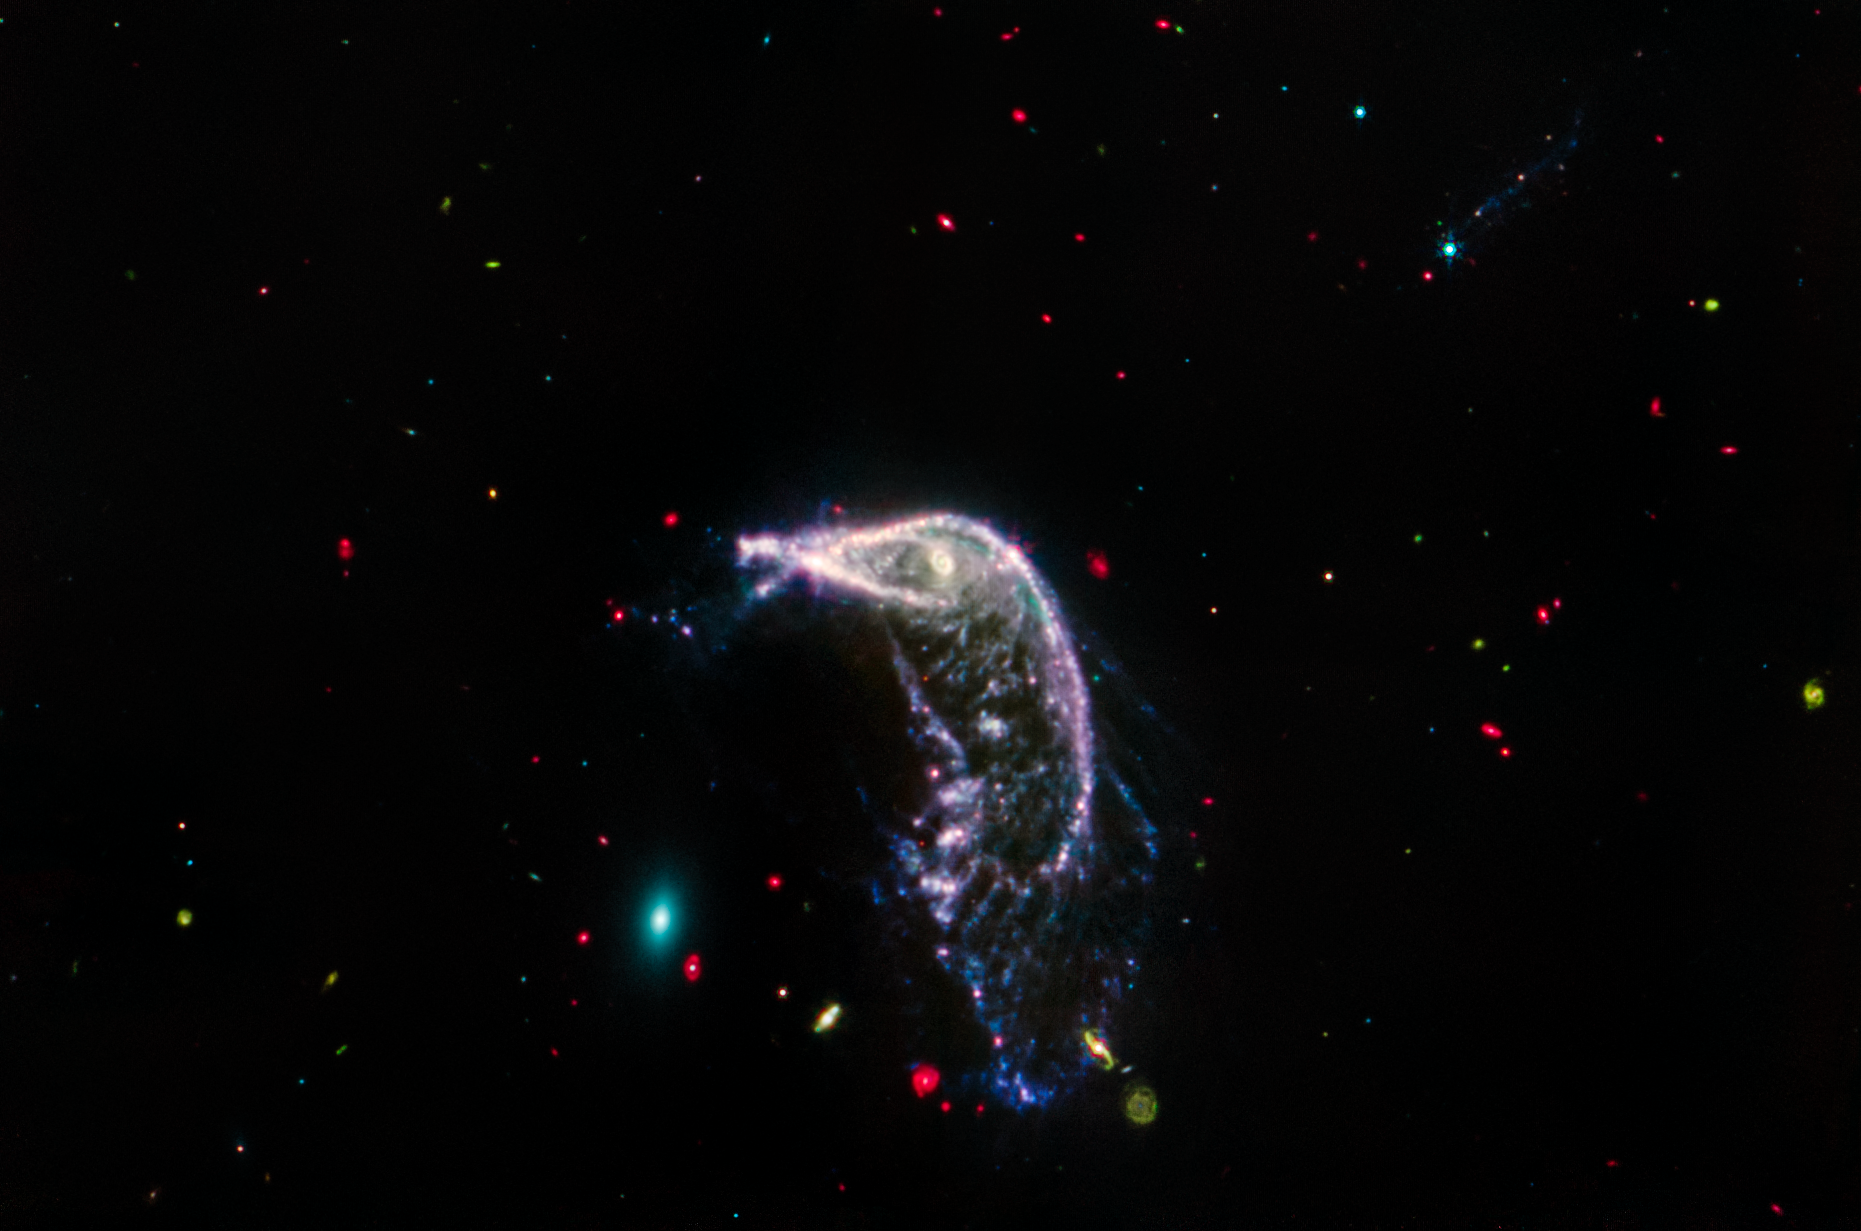

Interacting galaxies Arp 142 (MIRI image)

Webb’s mid-infrared view of interacting galaxies Arp 142 seems to sing in primary colours. The background of space is like a yawning darkness speckled with bright, multi-coloured beads.

This image was taken by MIRI, the telescope’s Mid-InfraRed Instrument, which astronomers use to study cooler and older objects, dust, and extremely distant galaxies.

Here, the Egg appears as an exceptionally small teal oval with gauzy layers. Mid-infrared light predominantly shows the oldest stars in the elliptical galaxy, which has lost or used up most of its gas and dust. This is why the view is so different from the combined image, which includes near-infrared light.

At right, the Penguin’s shape is relatively unchanged. The MIRI image shows all the gas and dust that has been distorted and stretched, as well as the smoke-like material, in blue, that includes carbon-containing molecules, known as polycyclic aromatic hydrocarbons.

Next, look for the edge-on galaxy catalogued PGC 1237172 at the top right — a dim, hazy line. Find it by looking for the bright blue star with small diffraction spikes positioned over the top of its left edge. This galaxy nearly disappears in mid-infrared light because its stars are very young and the galaxy isn’t overflowing with dust.

Now, scan the full image left to right to spot distant galaxies in the background. The red objects are encased in thick layers of dust. Some are spiral galaxies and others are more distant galaxies that can only be detected as dots or smudges. Green galaxies are laden with dust and are farther away. Bluer galaxies are closer. Zoom in carefully to see if a blue dot has minuscule diffraction spikes — those are stars, not galaxies.

Credit: NASA, ESA, CSA, STScI